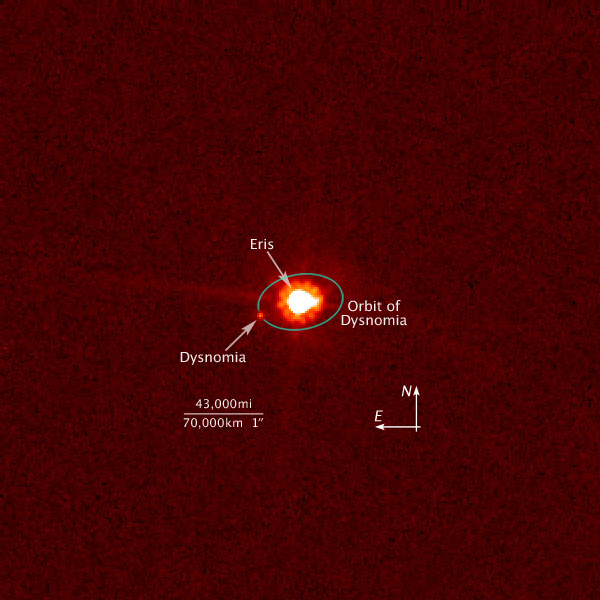

Hubble view of Eris and Dysnomia (annotated)

This is an image of the dwarf planet Eris (centre) and its satellite Dysnomia (at 9 o'clock position) taken with NASA/ESA's Hubble Space Telescope on Aug. 30, 2006. Hubble observations were obtained on Dec. 3, 2005 and Aug. 30, 2006 using the Advanced Camera for Surveys. The Hubble images were combined with images from the Keck telescopes taken on Aug. 20, 21, 30, and 31 to measure the satellite's orbit and calculate a mass for Eris, which is the largest dwarf planet in the Solar System.

Credit: NASA, ESA, and M. Brown (California Institute of Technology)